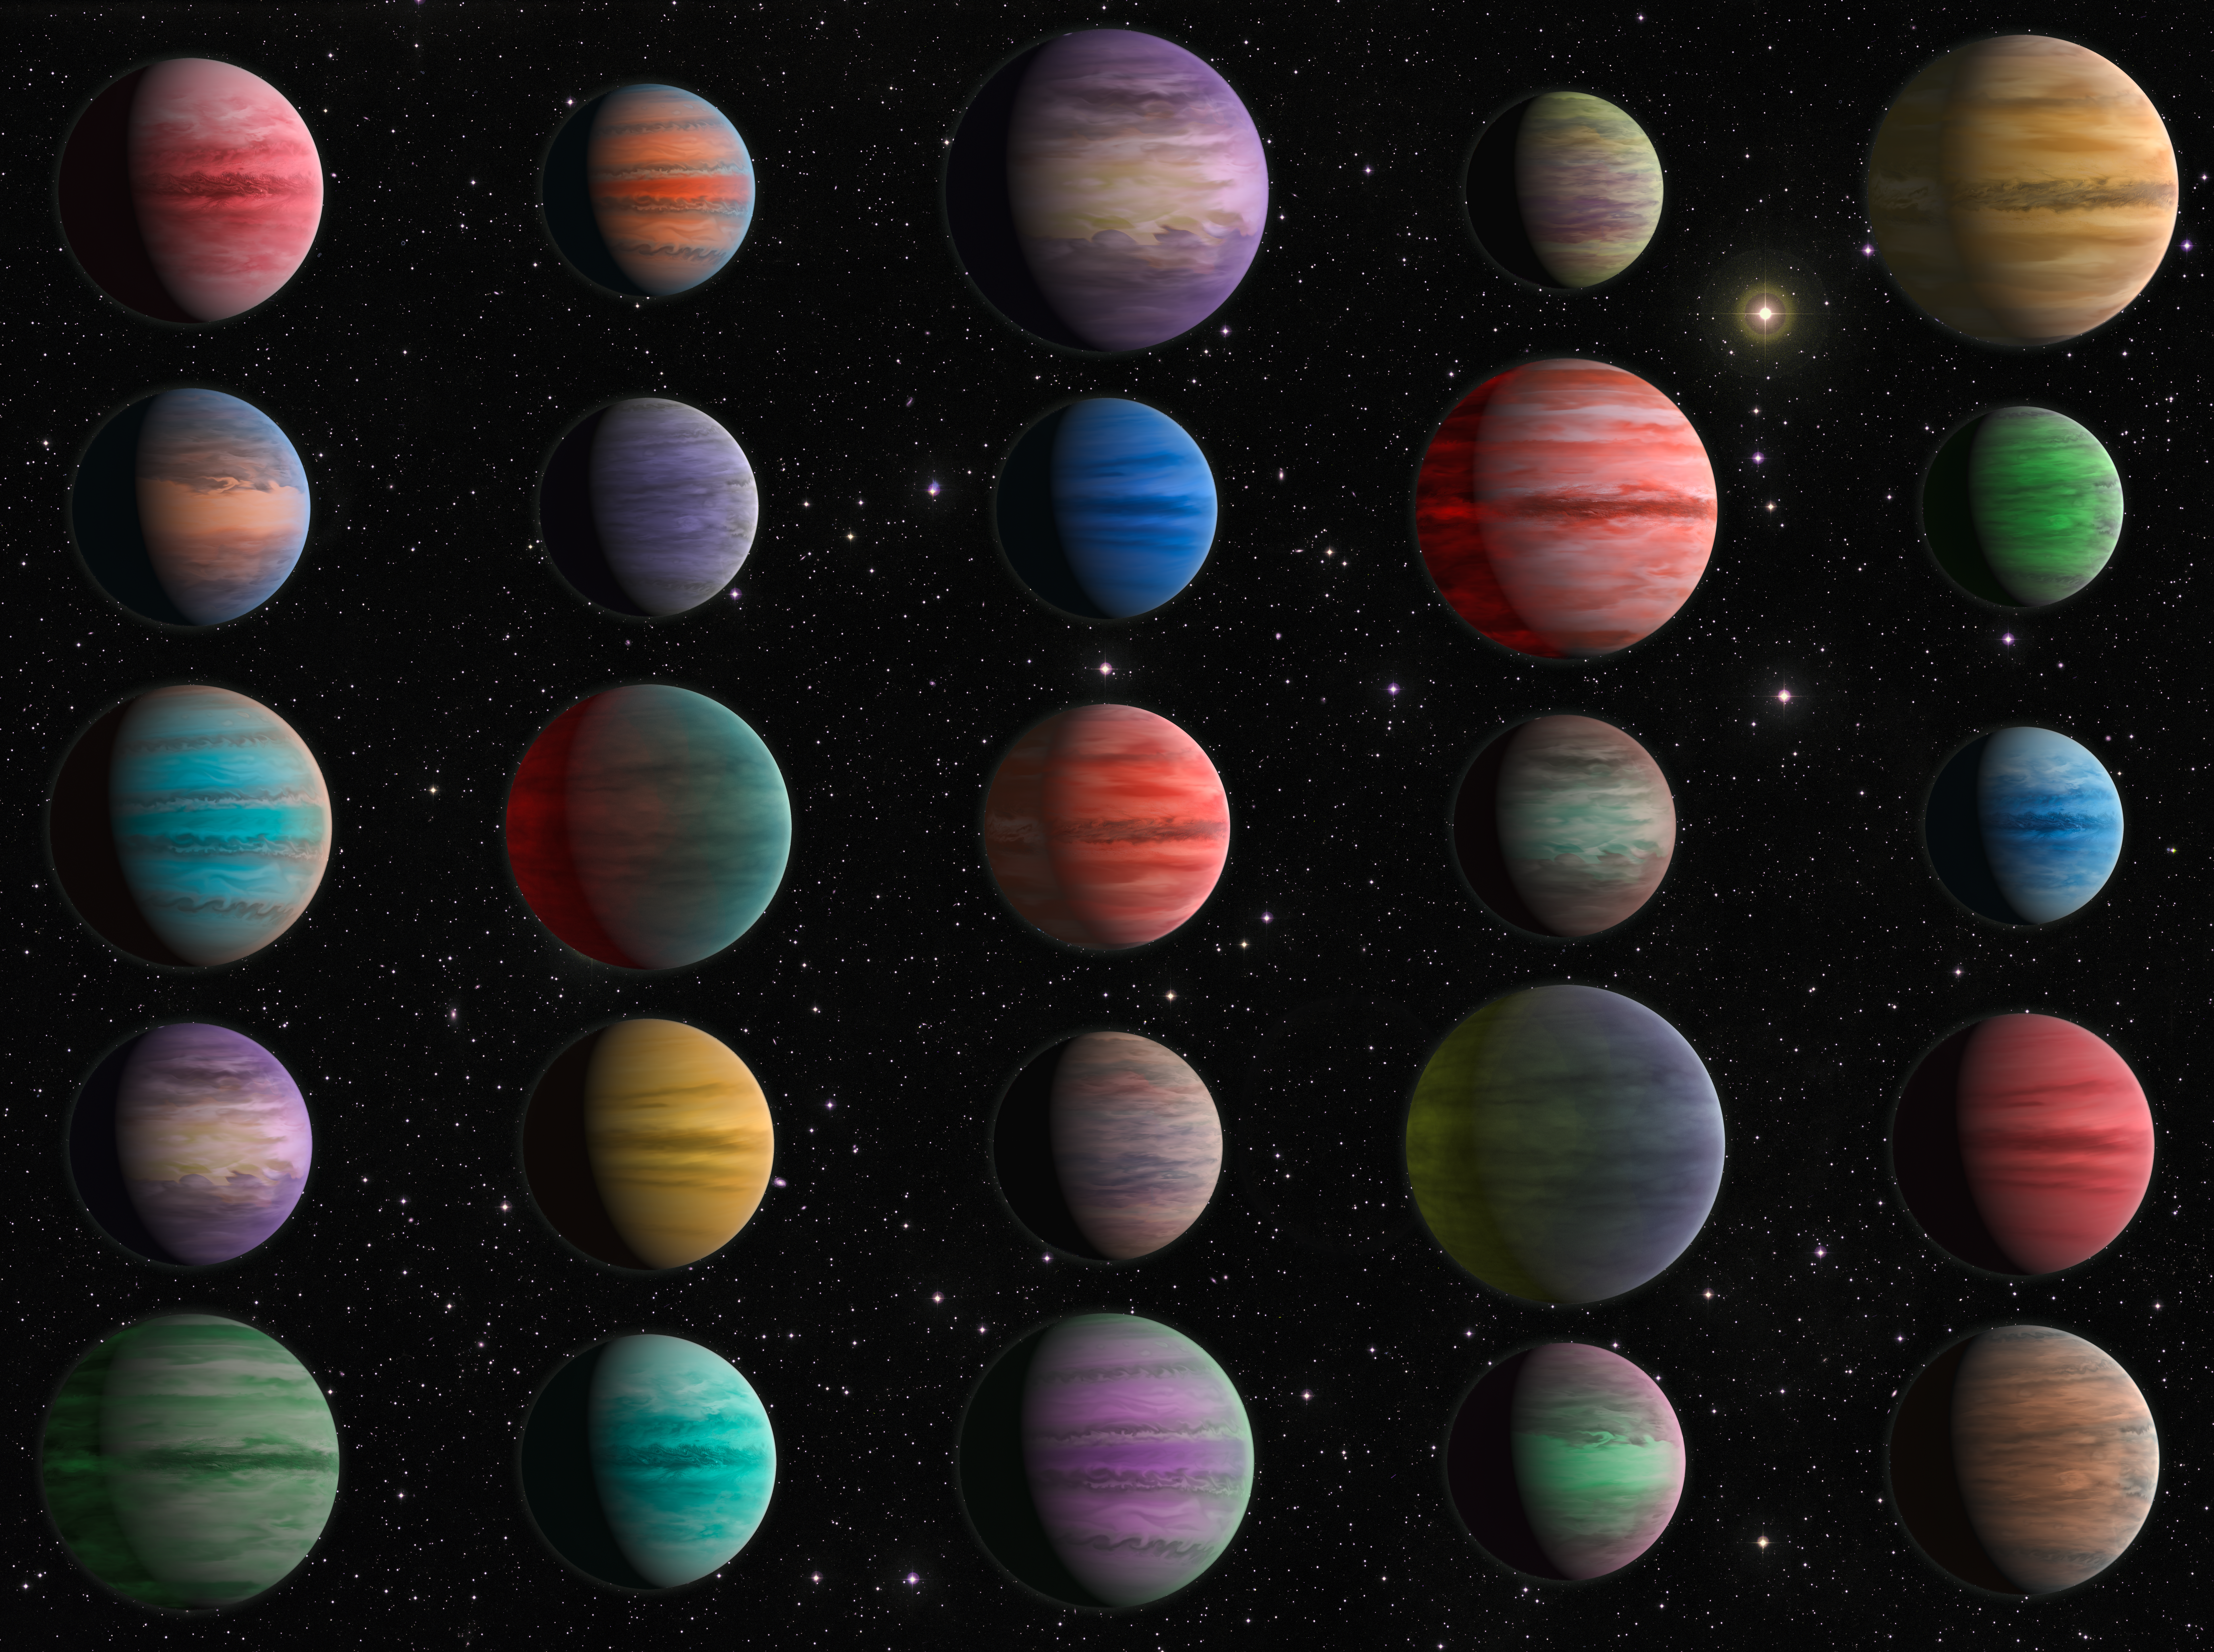

Artist’s Impression of 25 Hot Jupiters

Archival observations of 25 hot Jupiters by the NASA/ESA Hubble Space Telescope have been analysed by an international team of astronomers, enabling them to answer five open questions important to our understanding of exoplanet atmospheres. Amongst other findings, the team found that the presence of metal oxides and hydrides in the hottest exoplanet atmospheres was clearly correlated with the atmospheres' being thermally inverted.

Credit: ESA/Hubble, N. Bartmann